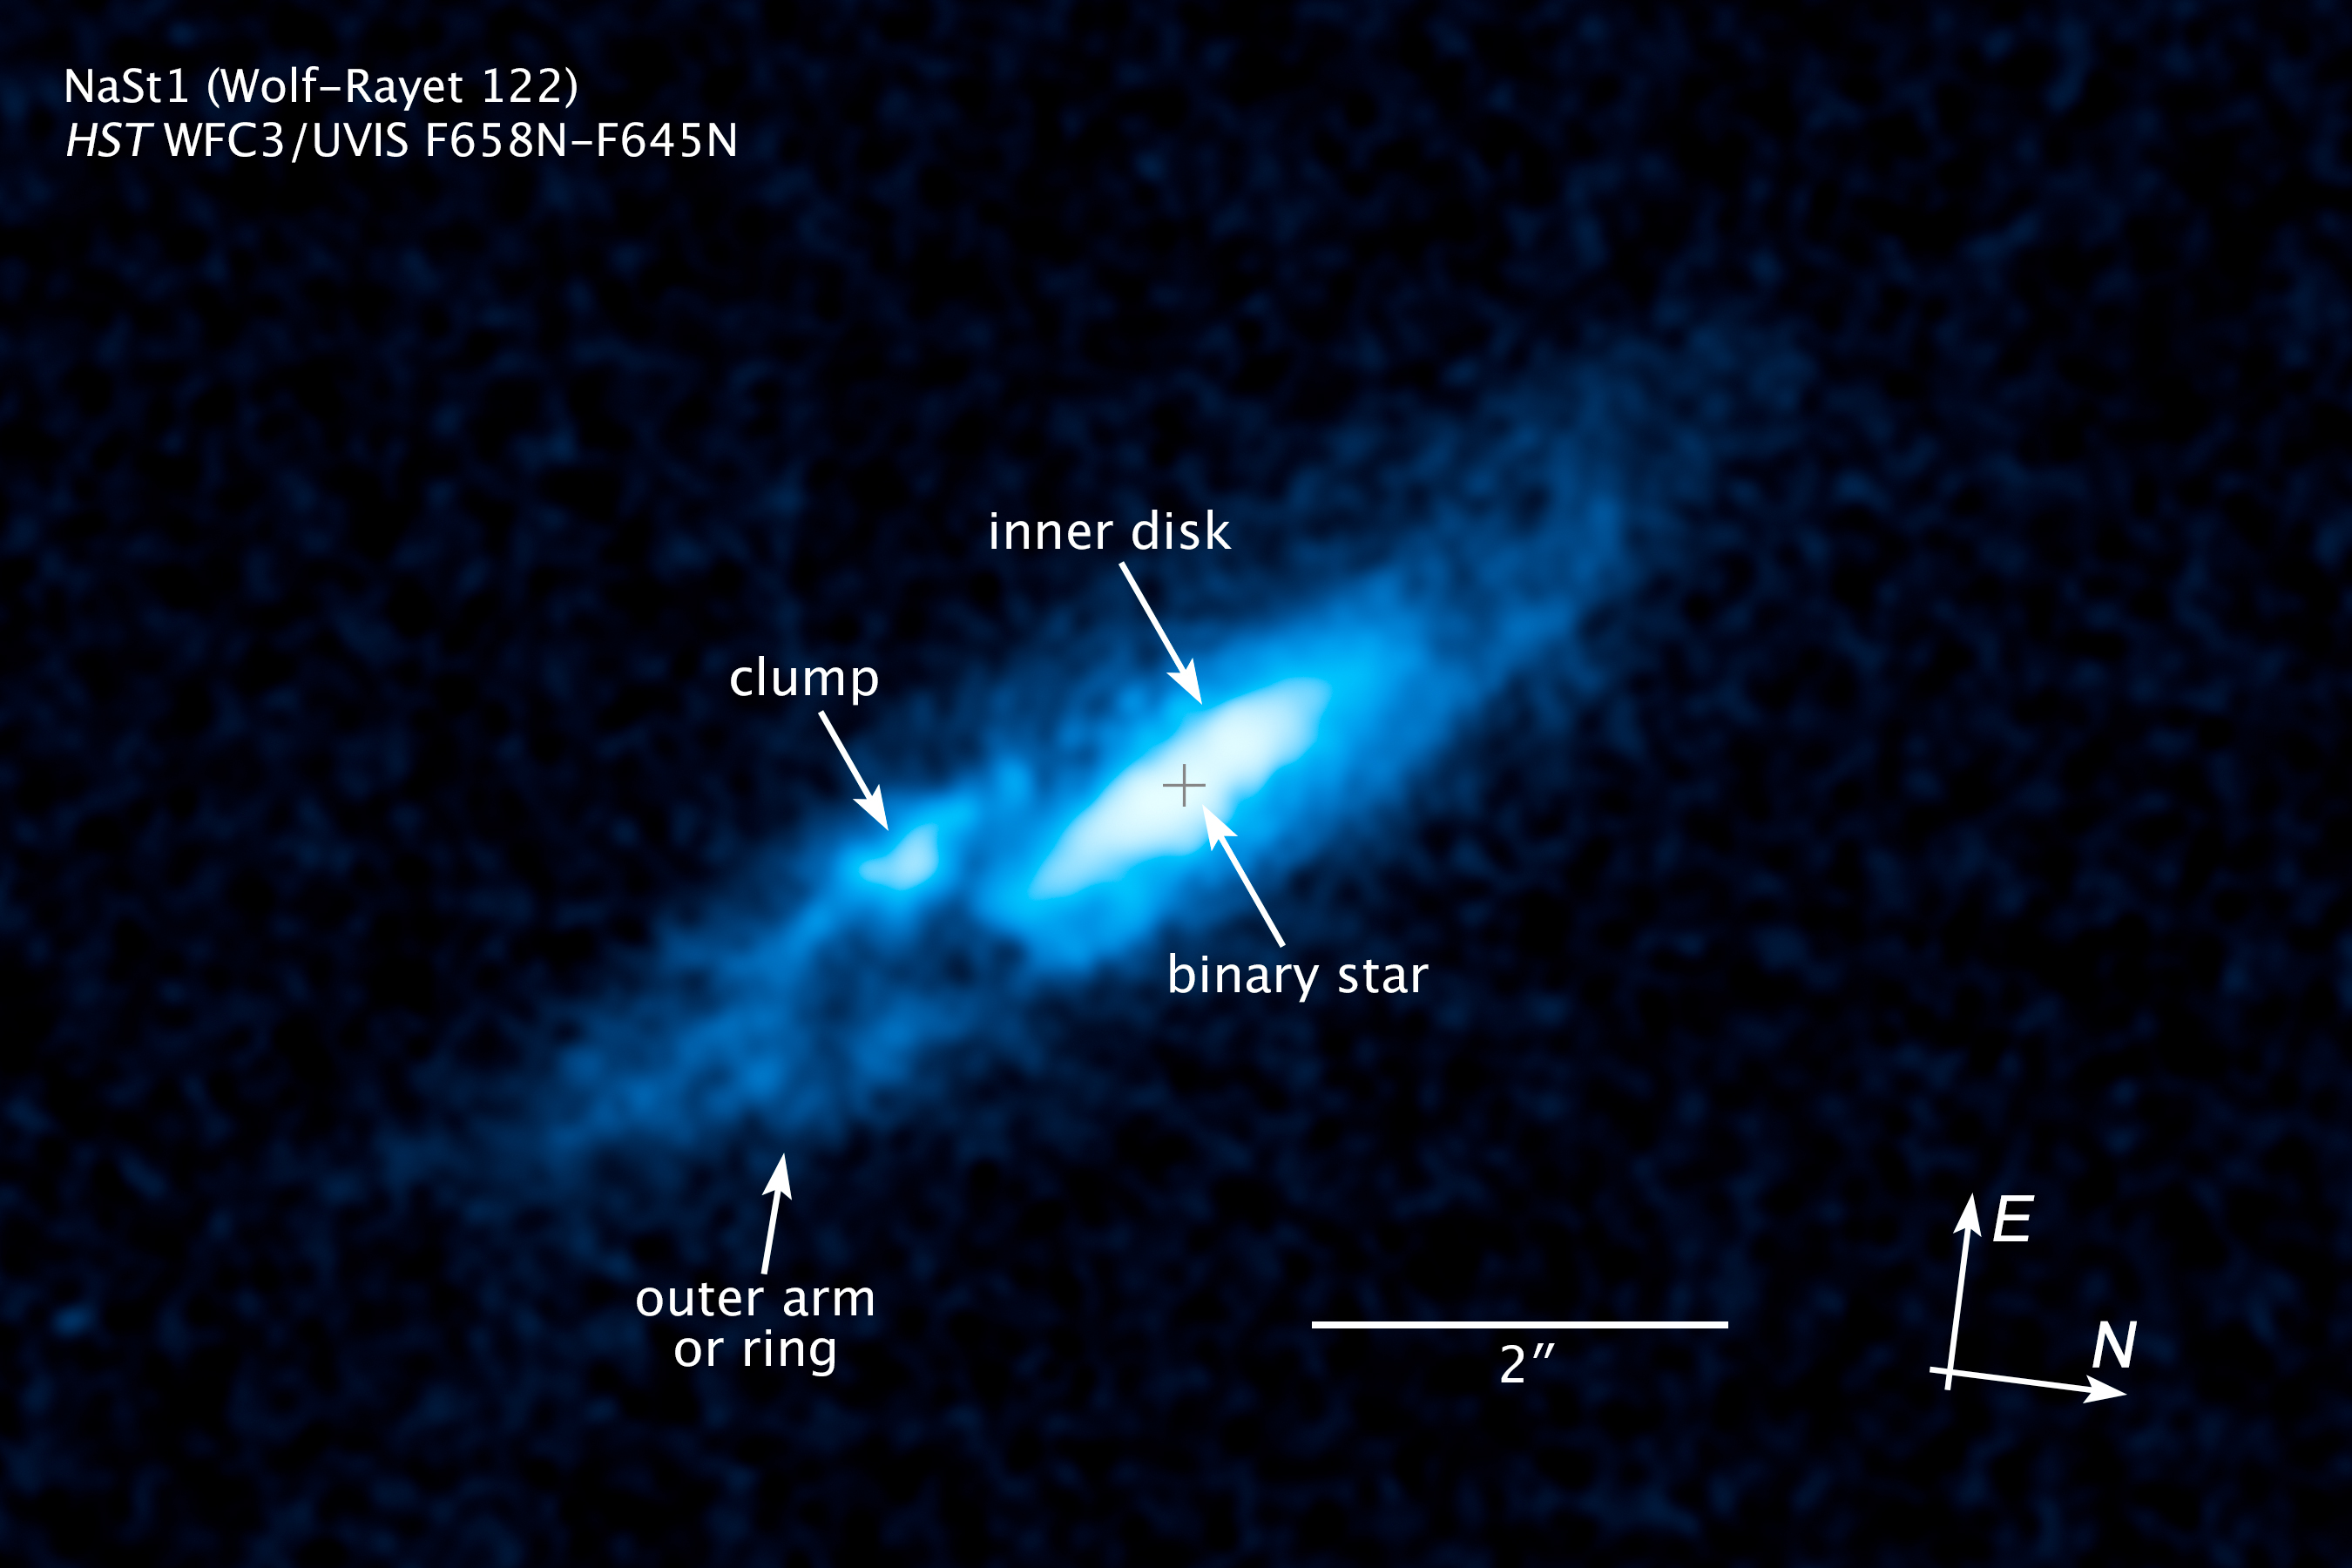

Compass and scale image of WR 122 (NaSt1)

This visible-light image taken by NASA's Hubble Space Telescope reveals a pancake-shaped disk of gas around an extremely bright star in our Milky Way galaxy. The disk glows brightly in the light of ionized nitrogen.

The central star is nicknamed "Nasty 1," derived from its catalogue name of NaSt1. Nasty 1 is thought to be a Wolf-Rayet star, a massive, rapidly evolving star weighing well over 10 times the mass of our Sun. The star is losing its hydrogen-filled outer layers quickly, exposing its super-hot and extremely bright helium-burning core.

Nasty 1 is thought to have a companion, and gravitational interactions between them may have created the gas disk. Both stars are heavily obscured by gas and dust in the disk. Hubble observations suggest that as Nasty 1 sheds its weight, some of the mass is falling onto a companion star and some is leaking into space, forming the disk. The vast structure is nearly 2 trillion miles wide. The disk is clumpy because astronomers think the outbursts occur sporadically. The knot at left of center is an unusually bright clump of gas. The image is tinted blue to bring out details in the disk.

Astronomers were surprised to find the disk-like structure, which has never been seen before around a Wolf-Rayet star in our galaxy. The star may represent a brief transitory stage in the evolution of massive stars.

The Nasty 1 system may be as close as 3,000 light-years from Earth.

The observations were taken in April 2013 with the Wide Field Camera 3.

Credit: NASA, ESA, and Z. Levay (STScI) Acknowledgment: J. Mauerhan (University of California, Berkeley)